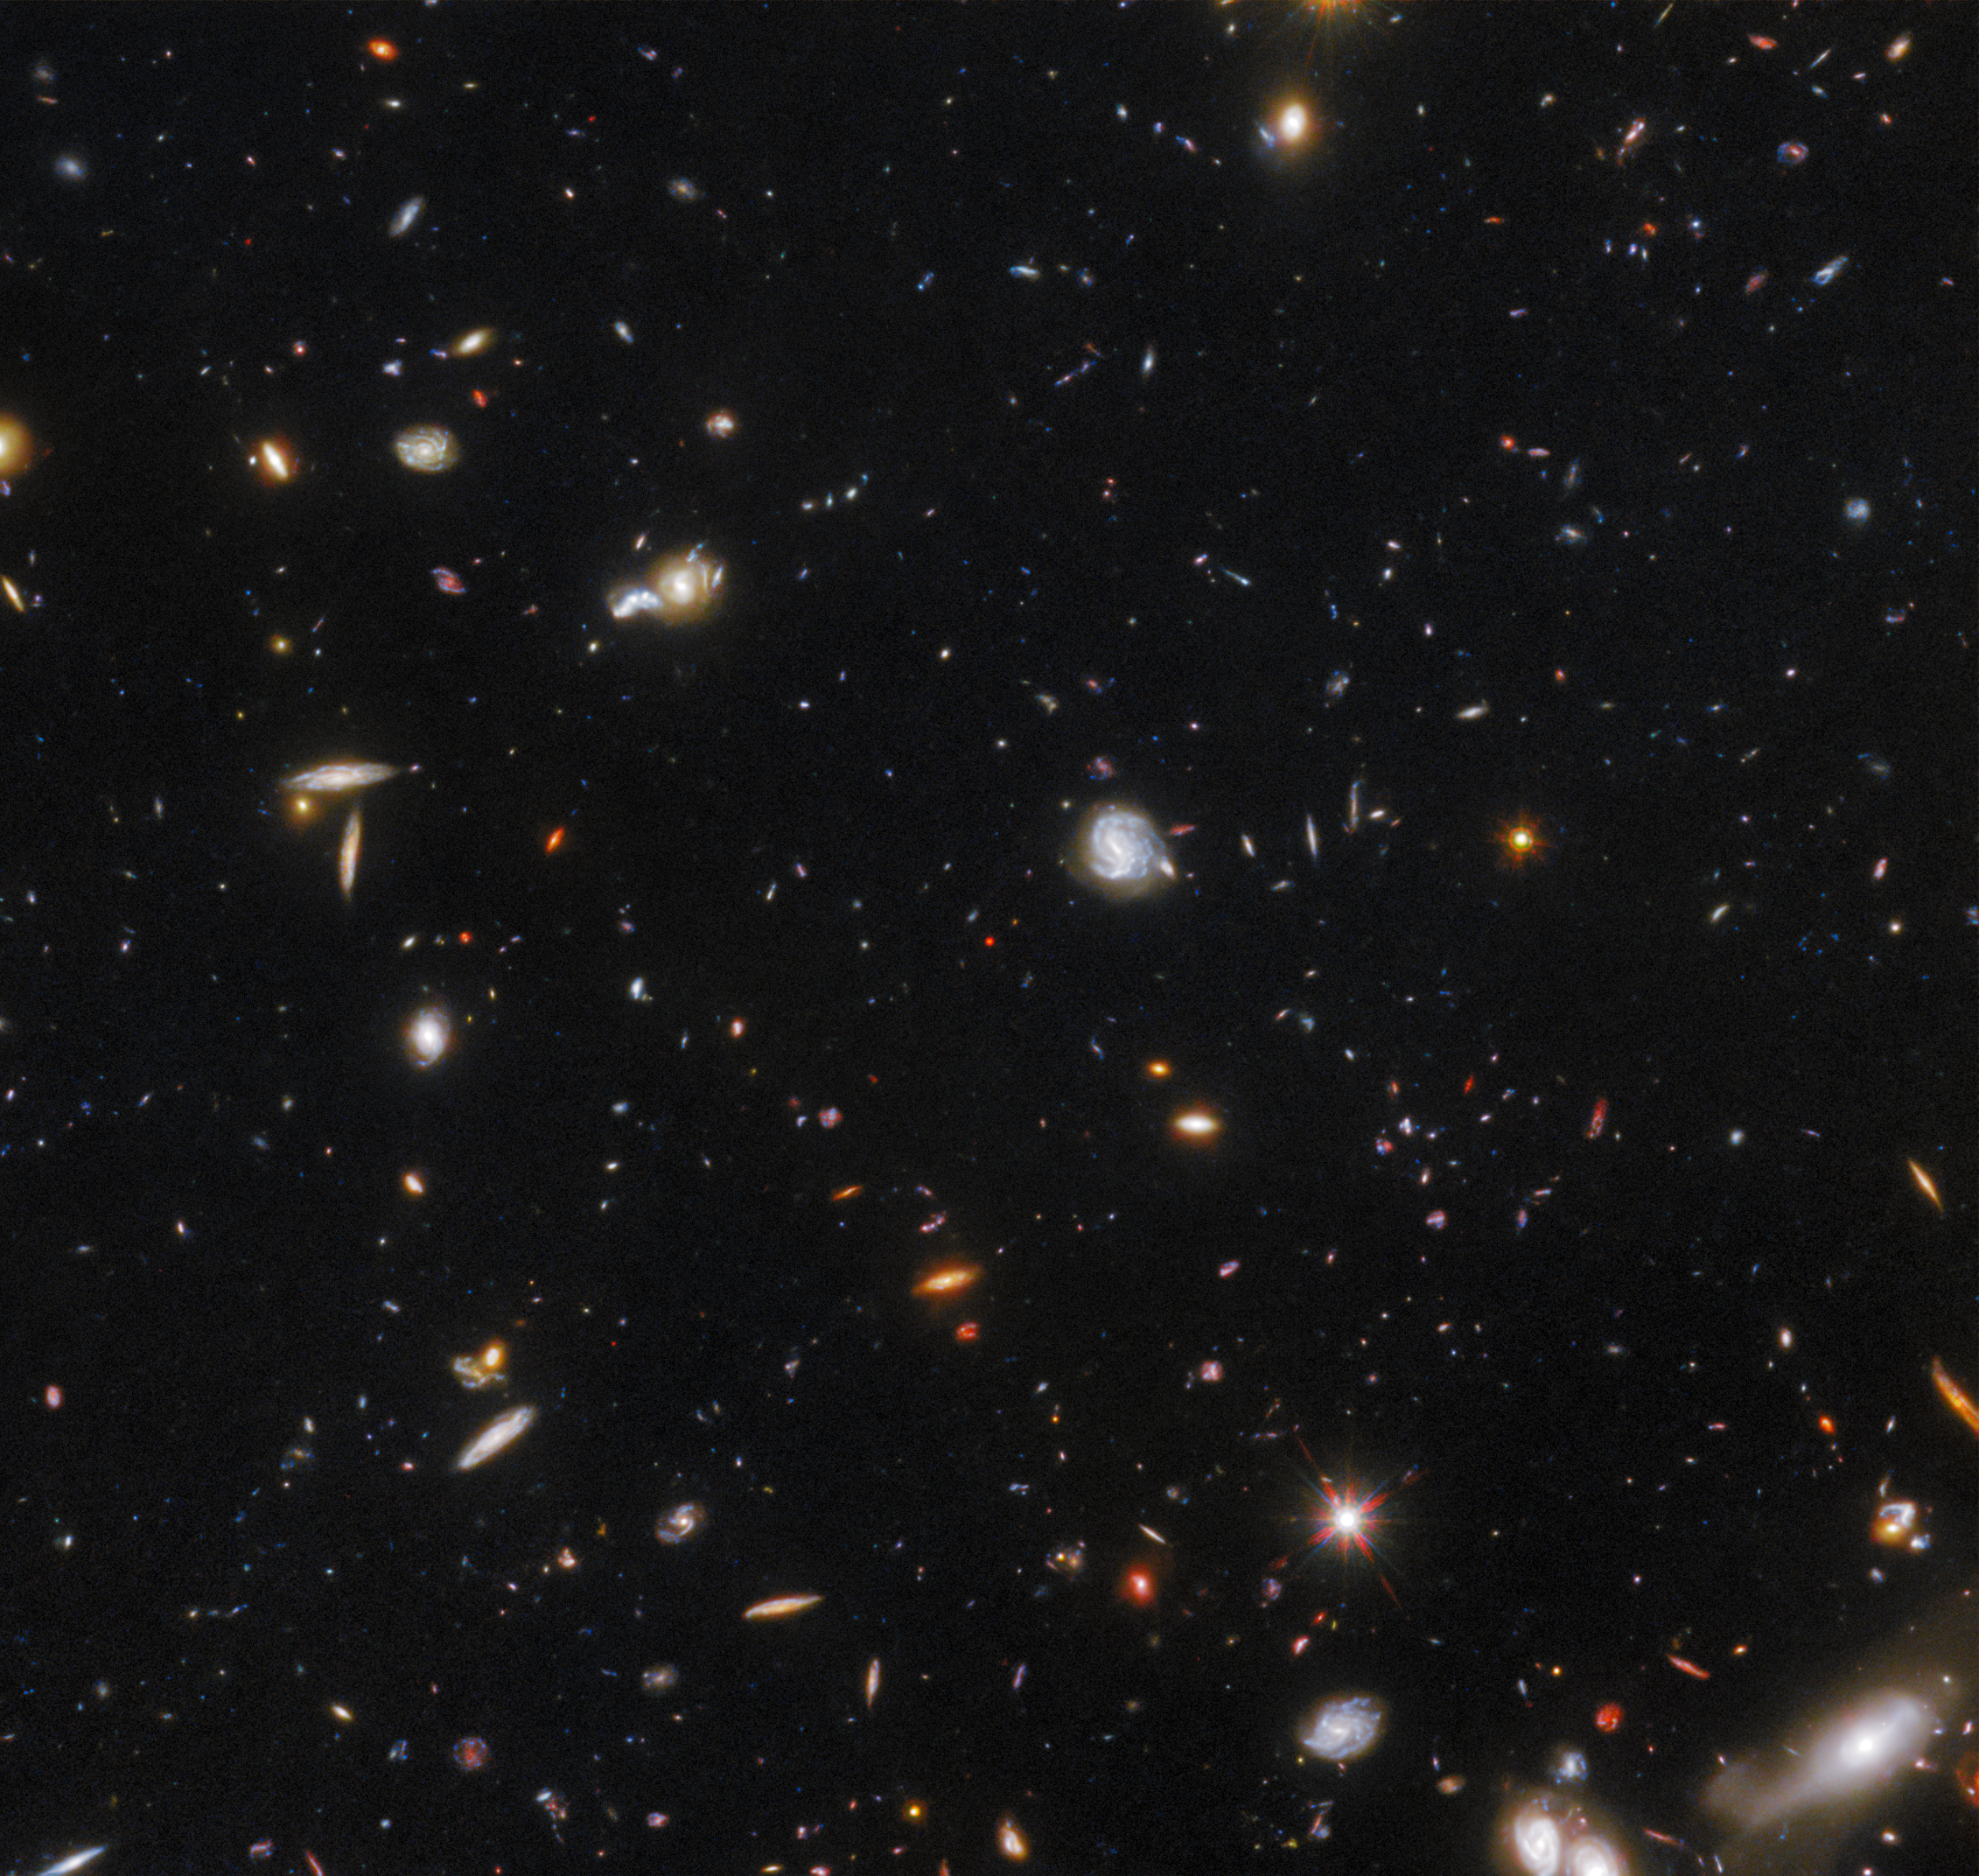

GNz7q in the Hubble GOODS-North field

An international team of astronomers using archival data from the NASA/ESA Hubble Space Telescope and other space- and ground-based observatories have discovered a unique object in the distant, early Universe that is a crucial link between young star-forming galaxies and the earliest supermassive black holes. This object is the first of its kind to be discovered so early in the Universe’s history, and had been lurking unnoticed in one of the best-studied areas of the night sky.

The object, which is referred to as GNz7q, is shown here in the centre of the cutout from the Hubble GOODS-North field.

Credit: NASA, ESA, G. Illingworth (University of California, Santa Cruz), P. Oesch (University of California, Santa Cruz; Yale University), R. Bouwens and I. Labbé (Leiden University), and the Science Team, S. Fujimoto et al. (Cosmic Dawn Center [DAWN] and University of Copenhagen)